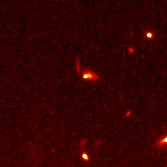

Hubble pinpoints distant supernovae

These Hubble Space Telescope images pinpoint three distant supernovae, which exploded and died billions of years ago. Scientists are using these faraway light sources to estimate if the universe was expanding at a faster rate long ago and is now slowing down.

Credit: Peter Garnavich, Harvard-Smithsonian Center for Astrophysics, the High-z Supernova Search Team, and NASA/ESA